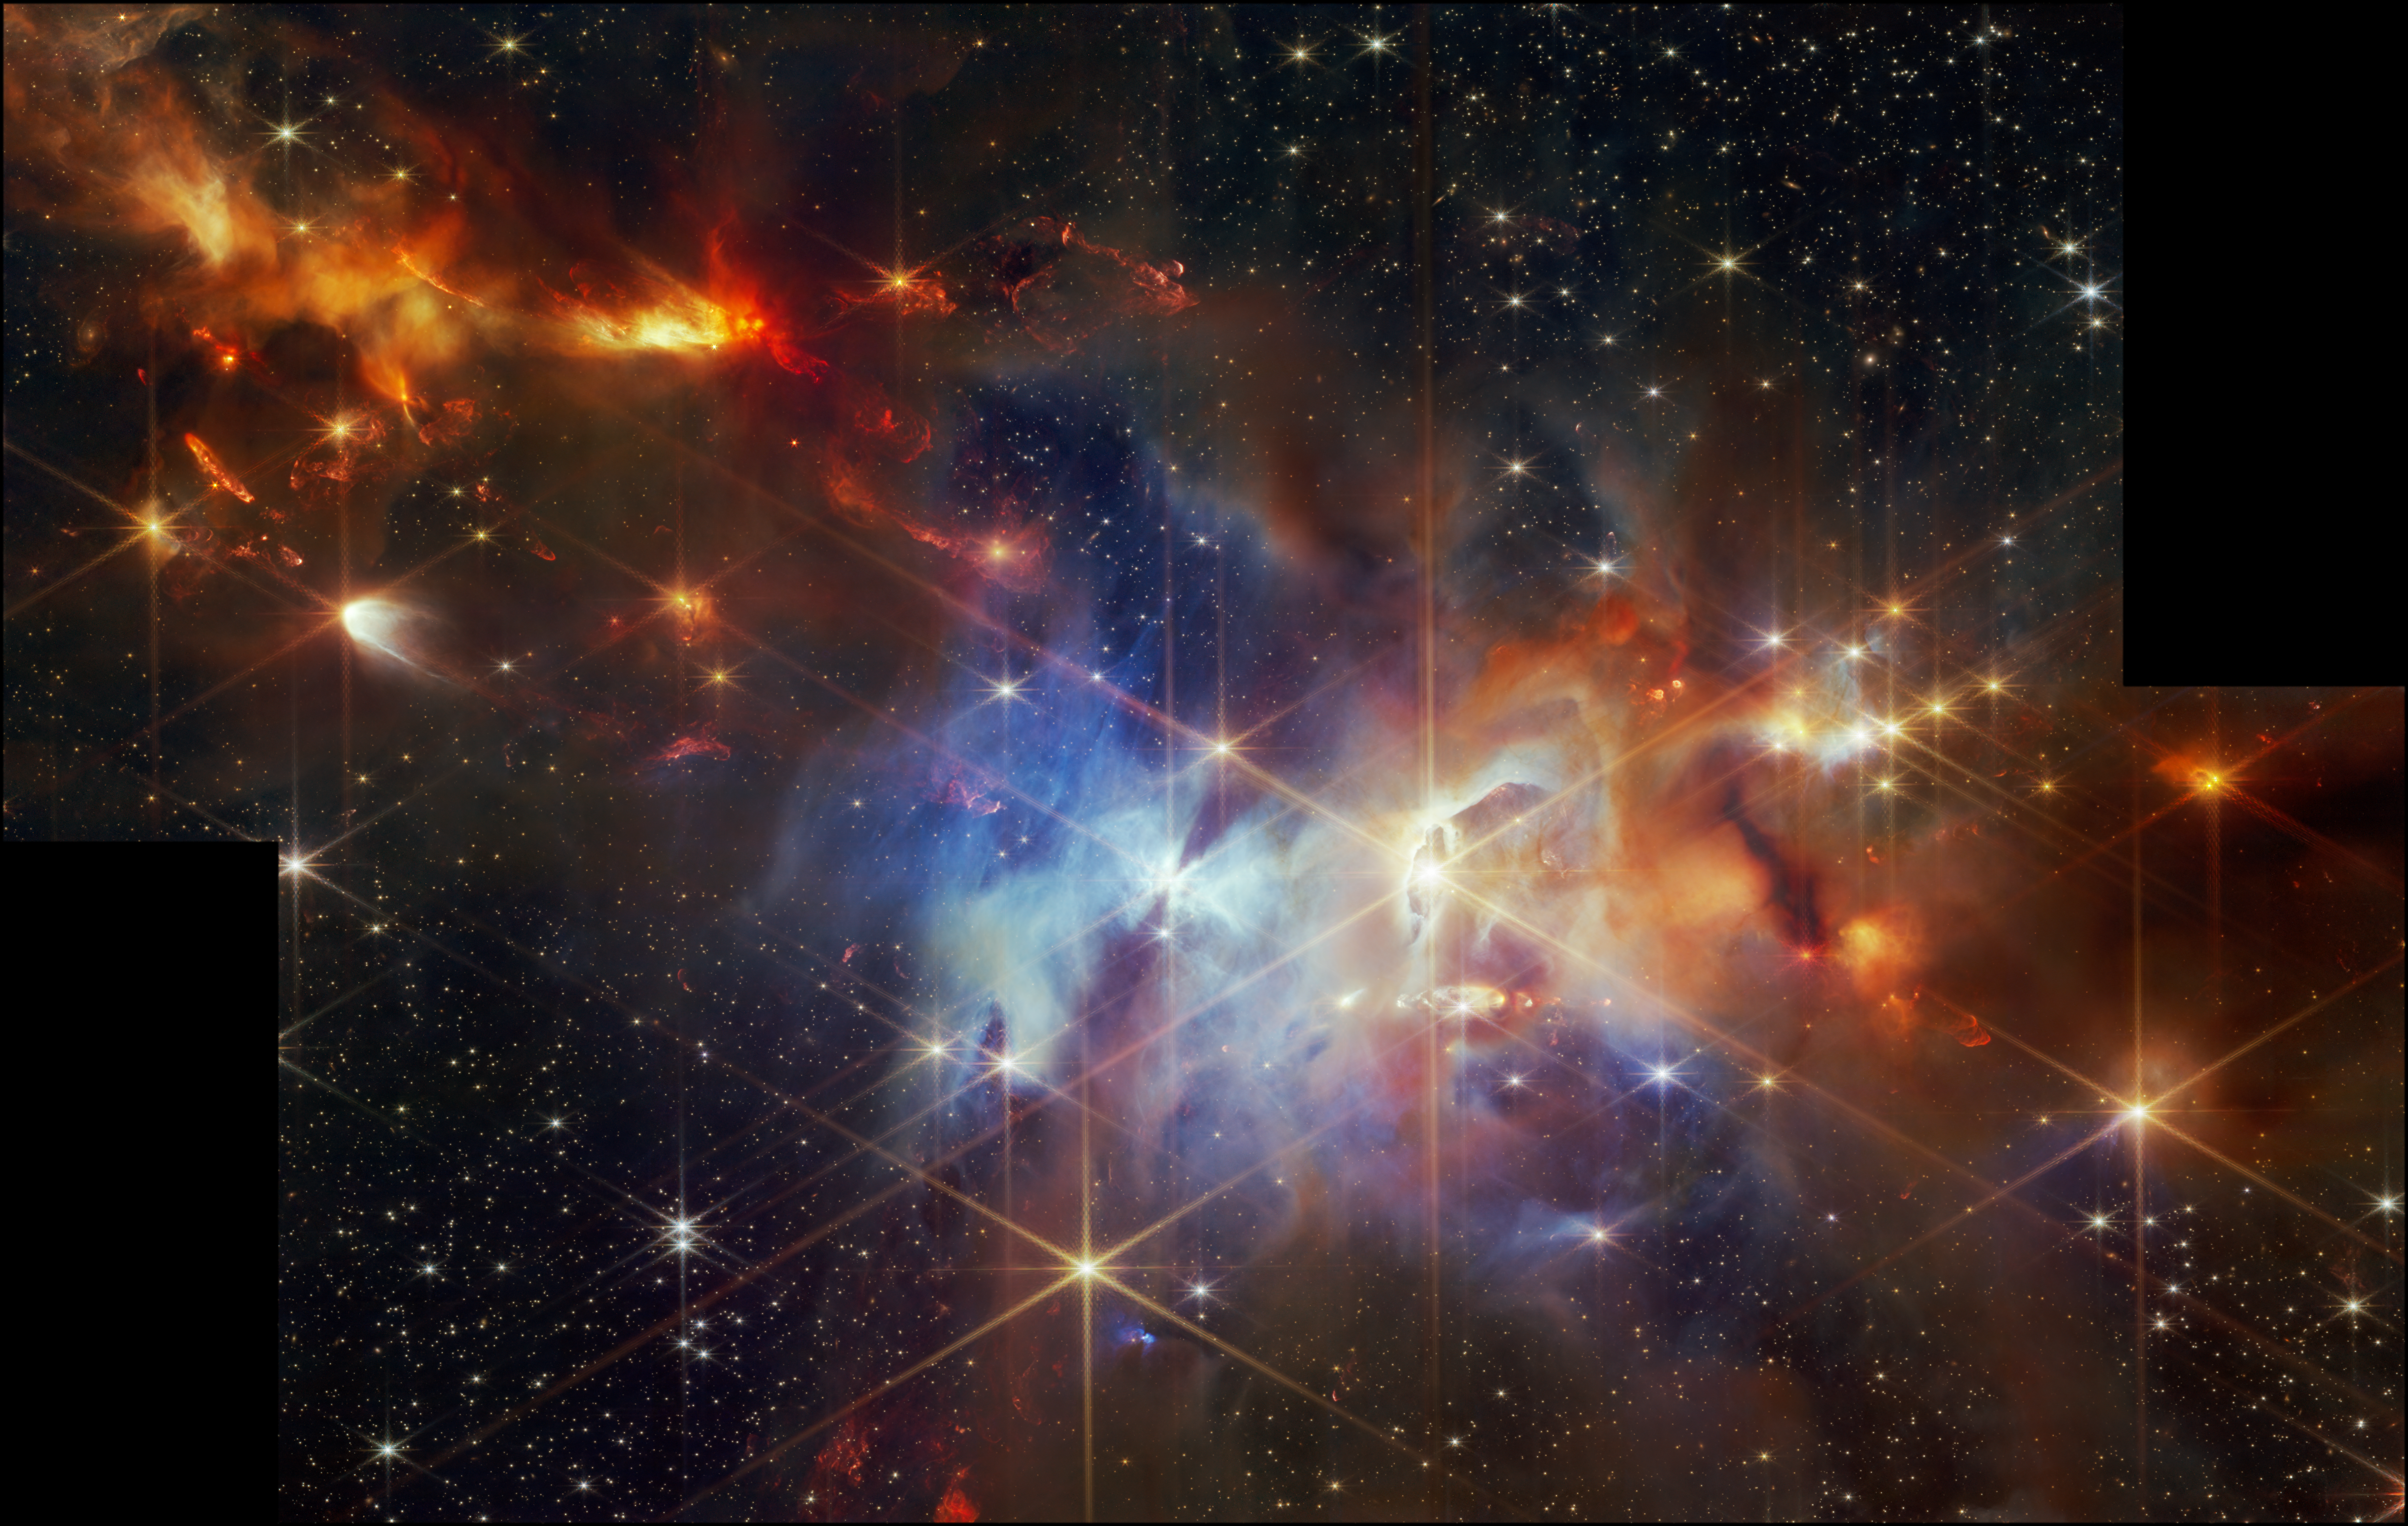

Serpens Nebula (NIRCam image)

In this image of the Serpens Nebula from the Near-InfraRed Camera (NIRCam) on the NASA/ESA/CSA James Webb Space Telescope, astronomers found a grouping of aligned protostellar outflows within one small region (the top left corner). In the Webb image, these jets are identified by bright red clumpy streaks, which are shockwaves caused when the jet hits the surrounding gas and dust.

The Serpens Nebula, located 1 300 light-years from Earth, is home to a particularly dense cluster of newly forming stars (around 100 000 years old), some of which will eventually grow to the mass of our Sun.

This region has been home to other coincidental discoveries, including the flapping 'Bat Shadow', which earned its name when 2020 data from the NASA/ESA Hubble Space Telescope revealed it to flap, or shift. This feature is visible at the centre of the Webb image.

To the right of the 'Bat Shadow' lies another intriguing feature—an eye-shaped crevice, which appears as if a star is bursting through. However, astronomers say looks may be deceiving here. This could just be where gases of different densities are layered on top of one another, similar to what is seen in the famous Pillars of Creation.

And to the right of that, an extremely dark patch could be a similar occurrence. The gas and dust here are so dense in comparison to the rest of the region that no near-infrared light is getting through.

Credit: NASA, ESA, CSA, STScI, K. Pontoppidan (NASA’s Jet Propulsion Laboratory), J. Green (Space Telescope Science Institute)